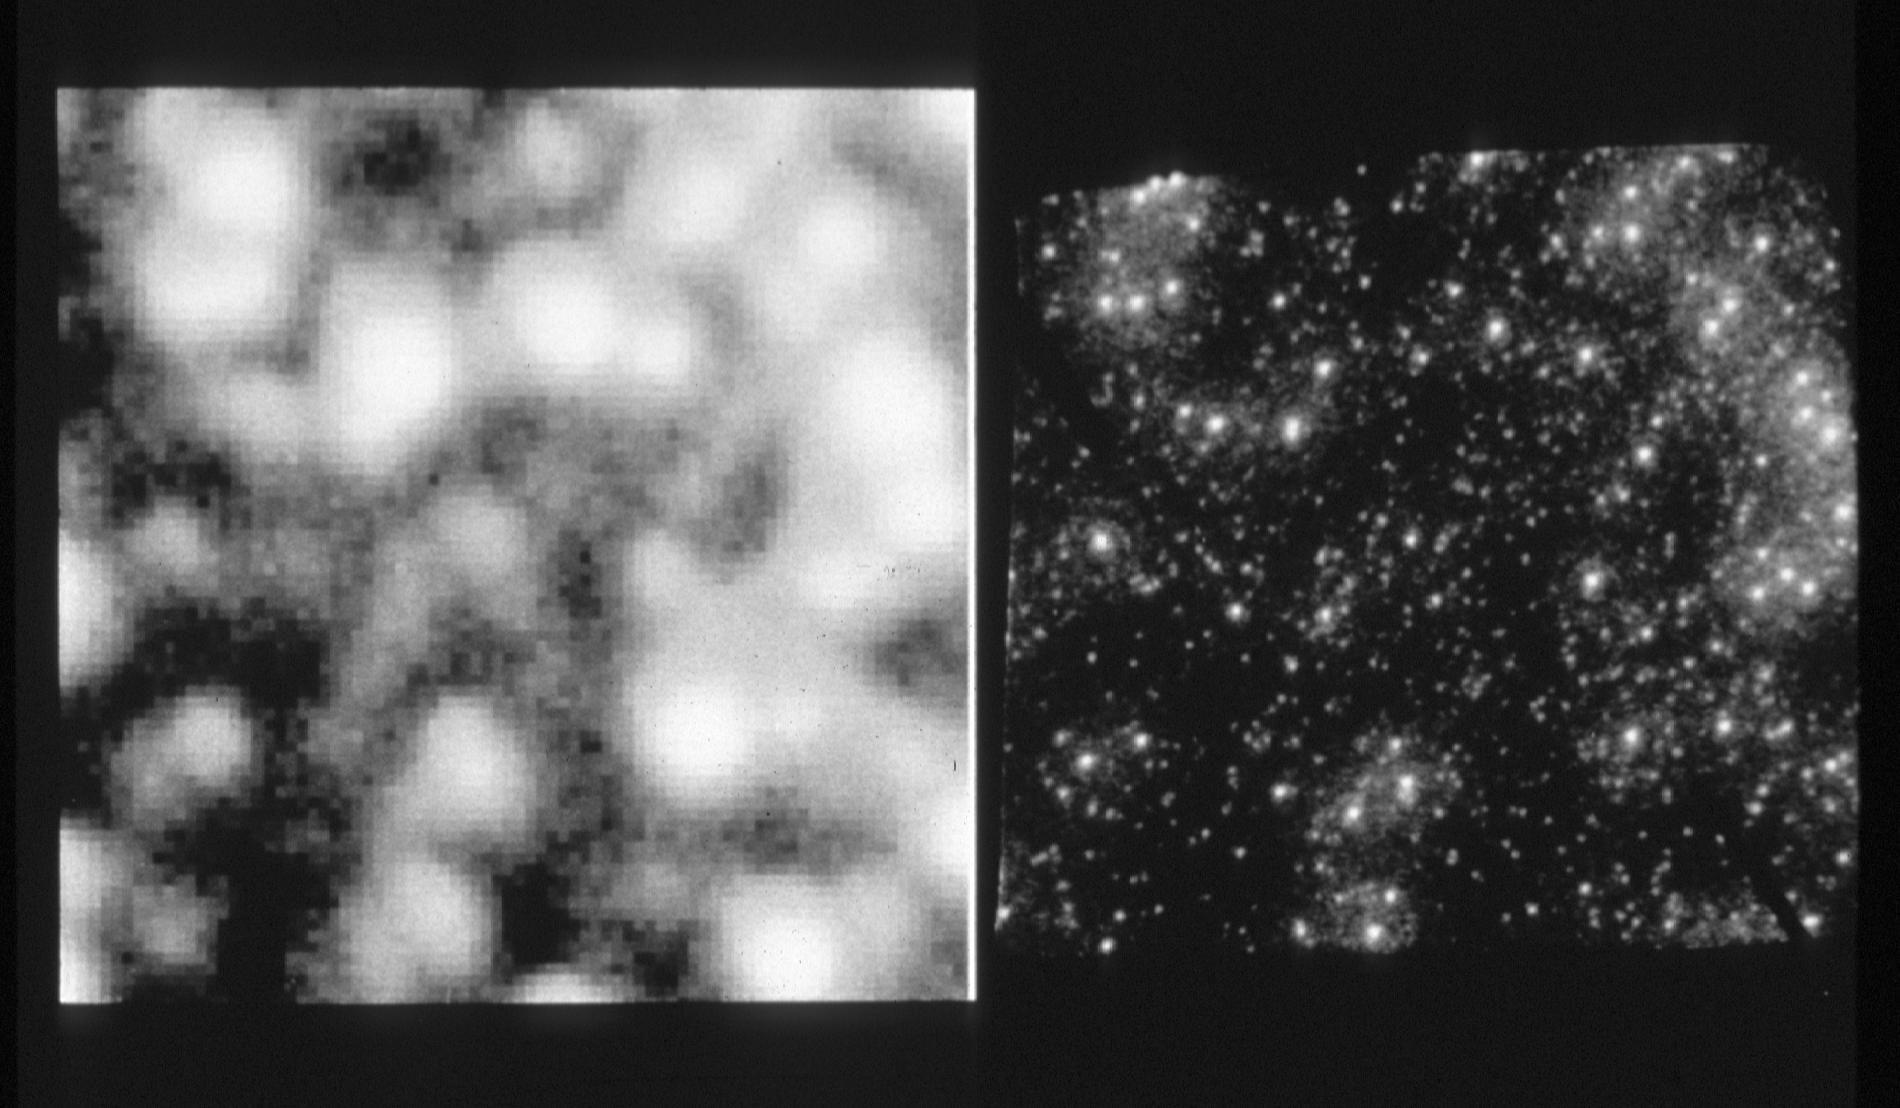

Globular star cluster M14

This pair of images of a region in the globular star cluster M-14, (located 70,000 light-years away) clearly demonstrate the high spatial resolution of NASA/ESA Hubble Space Telescope, as compared to the view from a ground-based telescope.

The image on the left, taken with the 4-meter telescope at Cerro Tololo Inter-American Observatory in Chile, has a resolution of 1.5 arc seconds. The image on the right, taken with European Space Agency's Faint Object Camera (FOC) aboard HST, yields stellar diameters of 0.08 arc second.

Credit: NASA/ESA